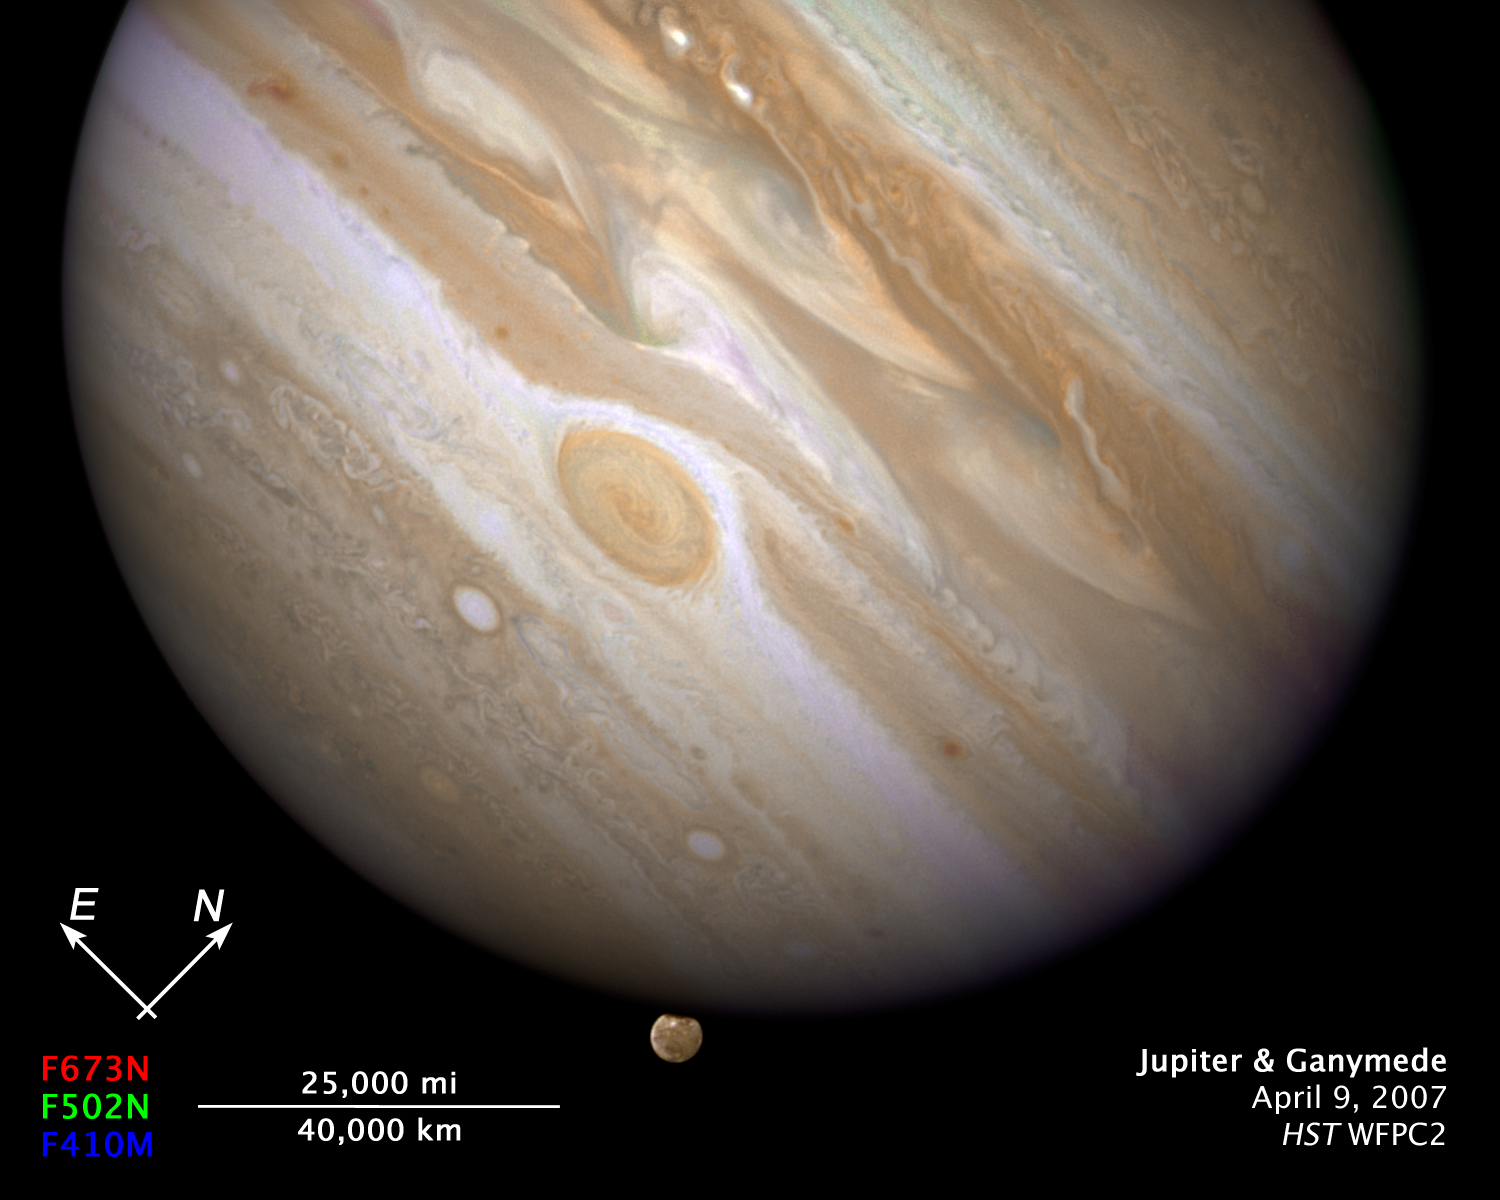

Compass and scale file for Jupiter and Ganymede

In this crisp Hubble image, Ganymede is shown just before it ducks behind the giant planet.Composed of rock and ice, Ganymede is the largest moon in our Solar System. It is even larger than the planet Mercury. But Ganymede looks like a dirty snowball next to Jupiter, the largest planet in our Solar System. Jupiter is so big that only part of its Southern Hemisphere can be seen in this image.

Hubble's view is so sharp that astronomers can see features on Ganymede's surface, most notably the white impact crater, Tros, and its system of rays, bright streaks of material blasted from the crater.

The image also shows Jupiter's Great Red Spot, the large eye-shaped feature near the centre

Credit: NASA, ESA and E. Karkoschka (University of Arizona)